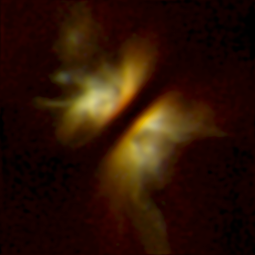

NICMOS Peers Through Dust to Reveal Young Stellar Disks. A View of IRAS 04302+2247

This image shows IRAS 04302+2247, a star hidden from direct view and seen only by the nebula it illuminates. Dividing the nebula in two is a dense, edge-on disk of dust and gas which appears as the thick, dark band crossing the center of the image. The disk has a diameter of 80 billion miles (15 times the diameter of Neptune's orbit), and has a mass comparable to the Solar Nebula, which gave birth to our planetary system. Dark clouds and bright wisps above and below the disk suggest that it is still building up from infalling dust and gas.

Credit: D. Padgett (IPAC/Caltech), W. Brandner (IPAC), K. Stapelfeldt (JPL) and NASA/ESA